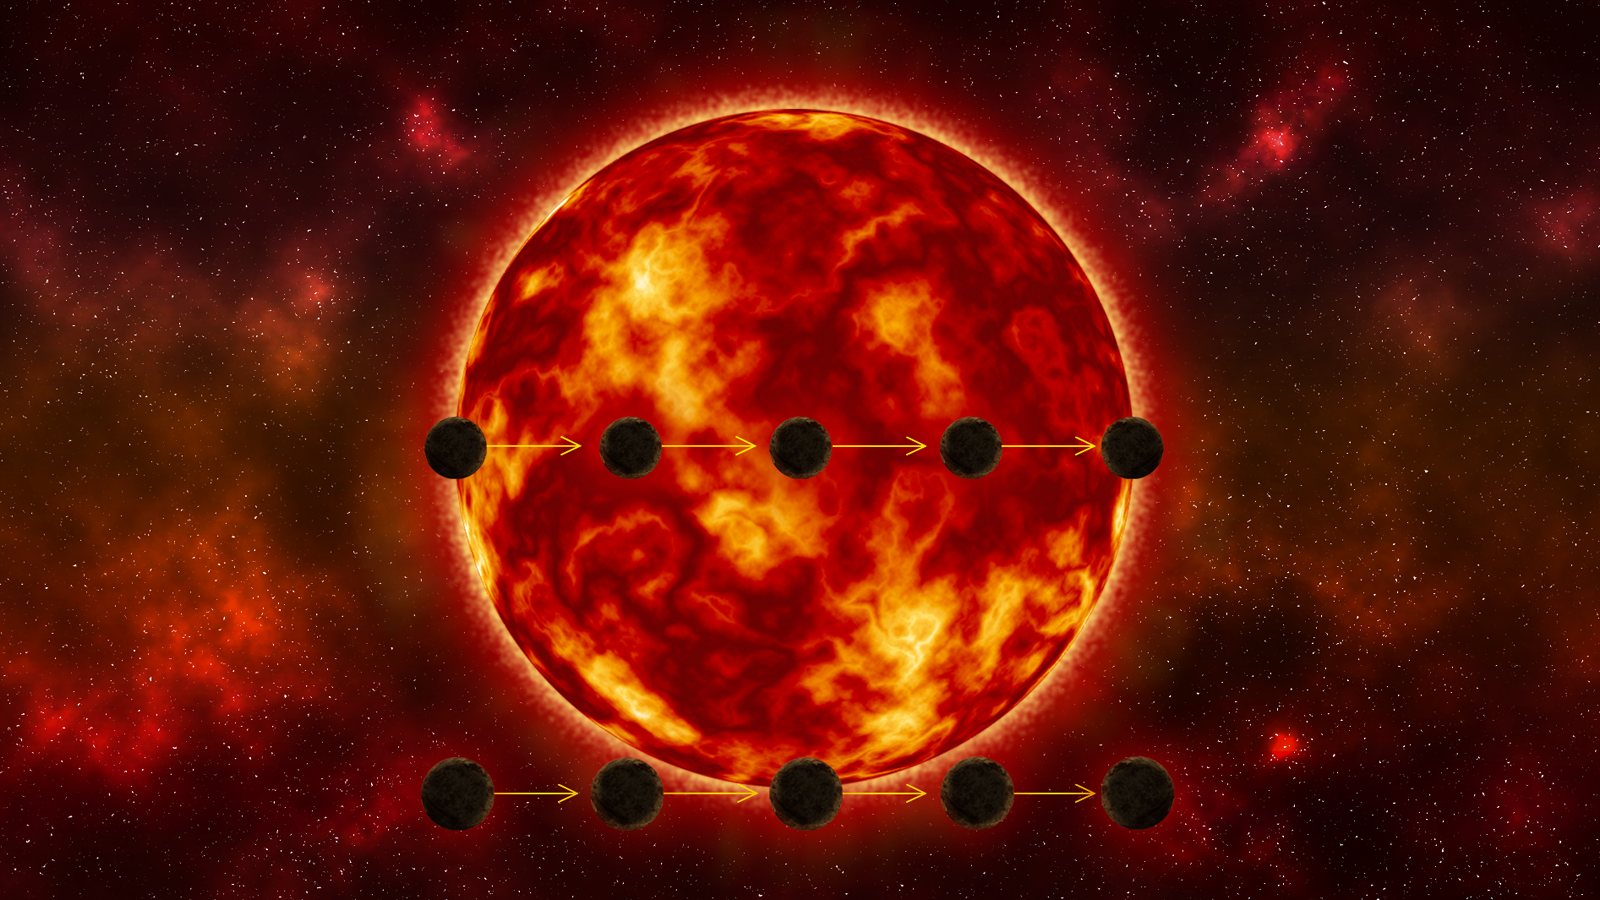

Comparison of transit paths

This diagram compares two scenarios for how an Earth-sized exoplanet is passing in front of its host star. The bottom path shows the planet just grazing the star. Studying the light from such a transit could lead to an inaccurate estimate of the planet’s size, making it seem smaller than it really is. The top path shows the optimum geometry, where the planet transits the full disk of the star. Hubble Space Telescope’s accuracy can distinguish between these two scenarios, yielding a precise measurement of the planet’s diameter.

Credit: NASA, ESA, E. Wheatley (STScI)